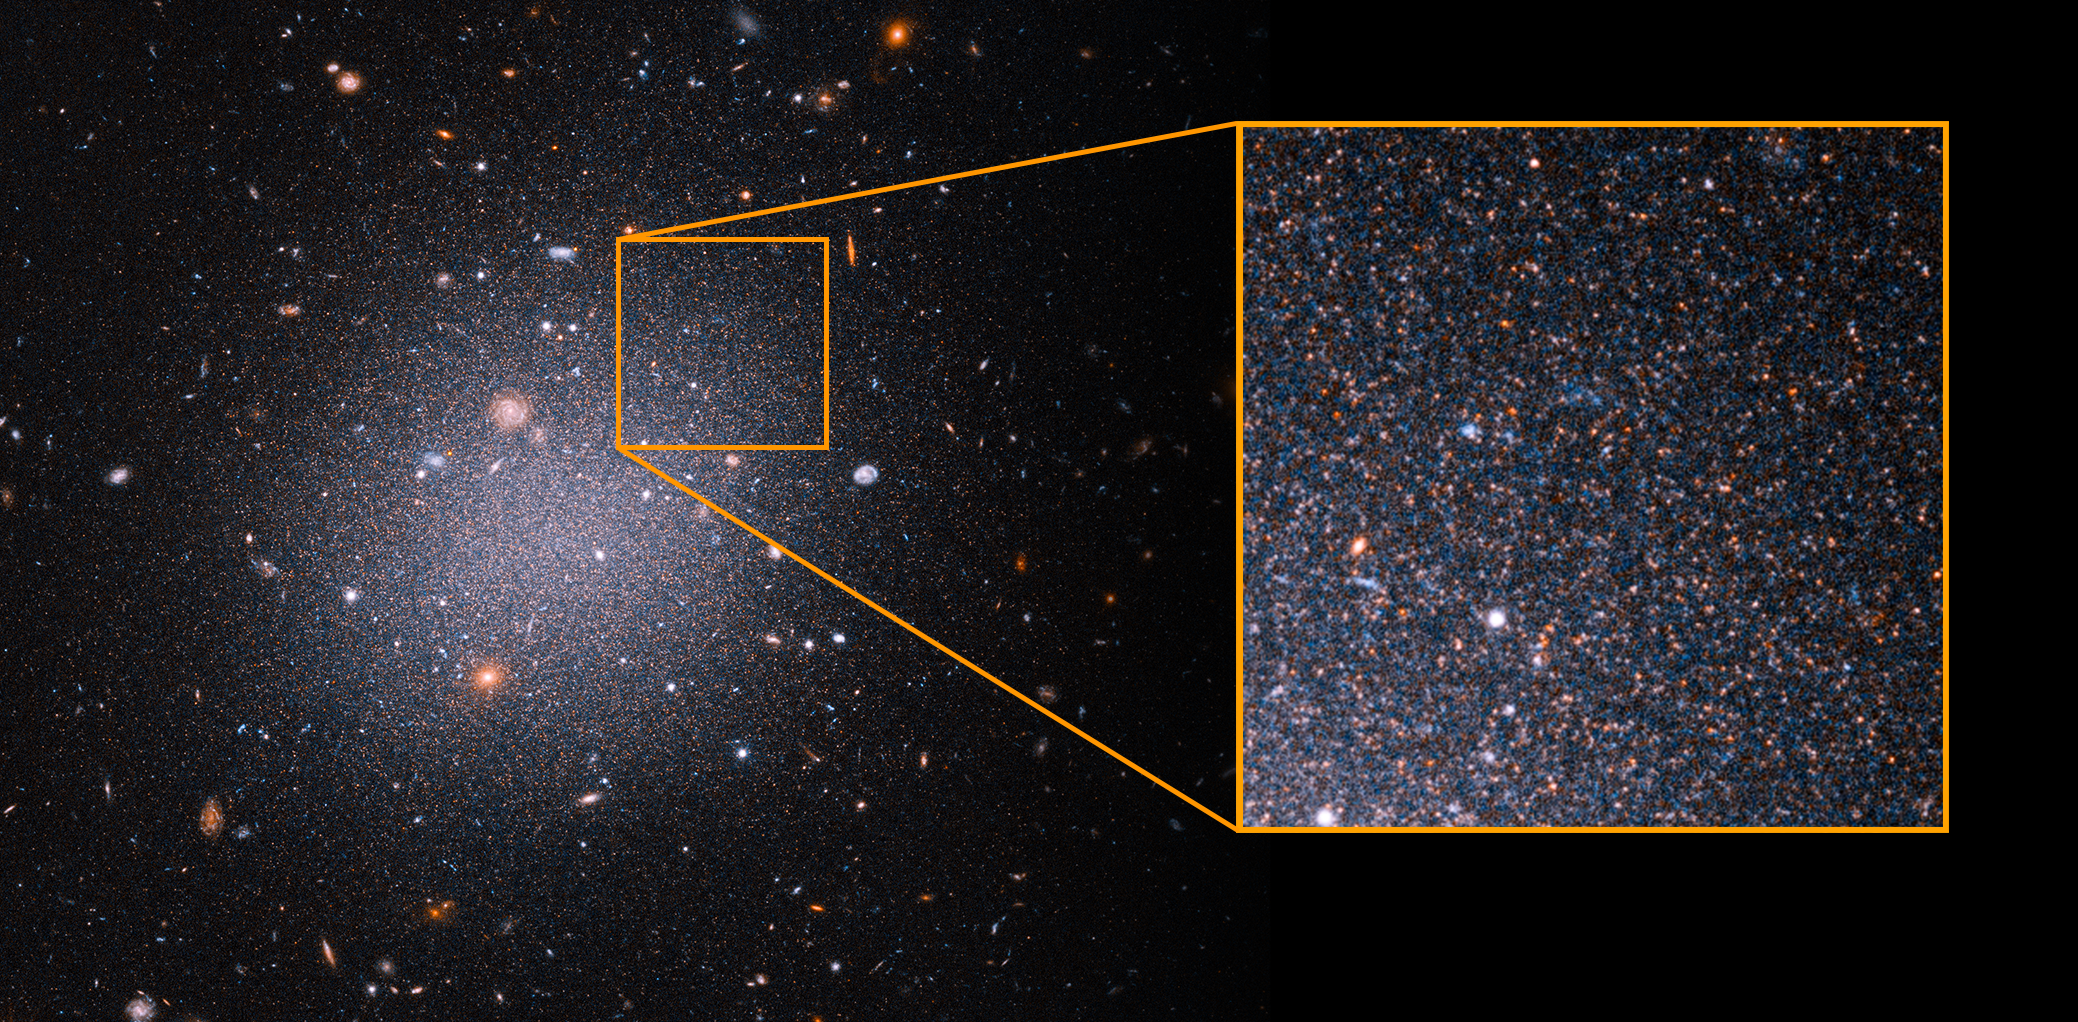

NGC1052-DF2 with pull-out of red giant stars

This image from the NASA/ESA Hubble Space Telescope offers a sampling of aging, red stars in the ultra-diffuse galaxy NGC 1052-DF2, or DF2. The galaxy continues to puzzle astronomers because it is lacking dark matter, an invisible form of matter that provides the gravitational glue to hold galaxies together. Precisely establishing the galaxy’s distance from Earth is a step toward solving the mystery.

The close-up at right reveals the many aging red giant stars on the outskirts of the galaxy that are used as intergalactic milepost markers. Researchers calculated a more accurate distance to DF2 by using Hubble to observe about 5,400 red giants. These older stars all reach the same peak brightness, so they are reliable yardsticks to measure distances to galaxies.

The research team estimates that DF2 is 72 million light-years from Earth. They say the distance measurement solidifies their claim that DF2 lacks dark matter. The galaxy contains at most 1/400th the amount of dark matter that the astronomers had expected, based on theory and observations of many other galaxies.

Called an ultra-diffuse galaxy, the galactic oddball is almost as wide as the Milky Way, but it contains only 1/200th the number of stars as our galaxy. The ghostly galaxy doesn't appear to have a noticeable central region, spiral arms, or a disk.

The observations were taken between December 2020 and March 2021 with Hubble's Advanced Camera for Surveys.

Credit: NASA, ESA, STScI, Zili Shen (Yale), Pieter van Dokkum (Yale), Shany Danieli (IAS), Alyssa Pagan (STScI)